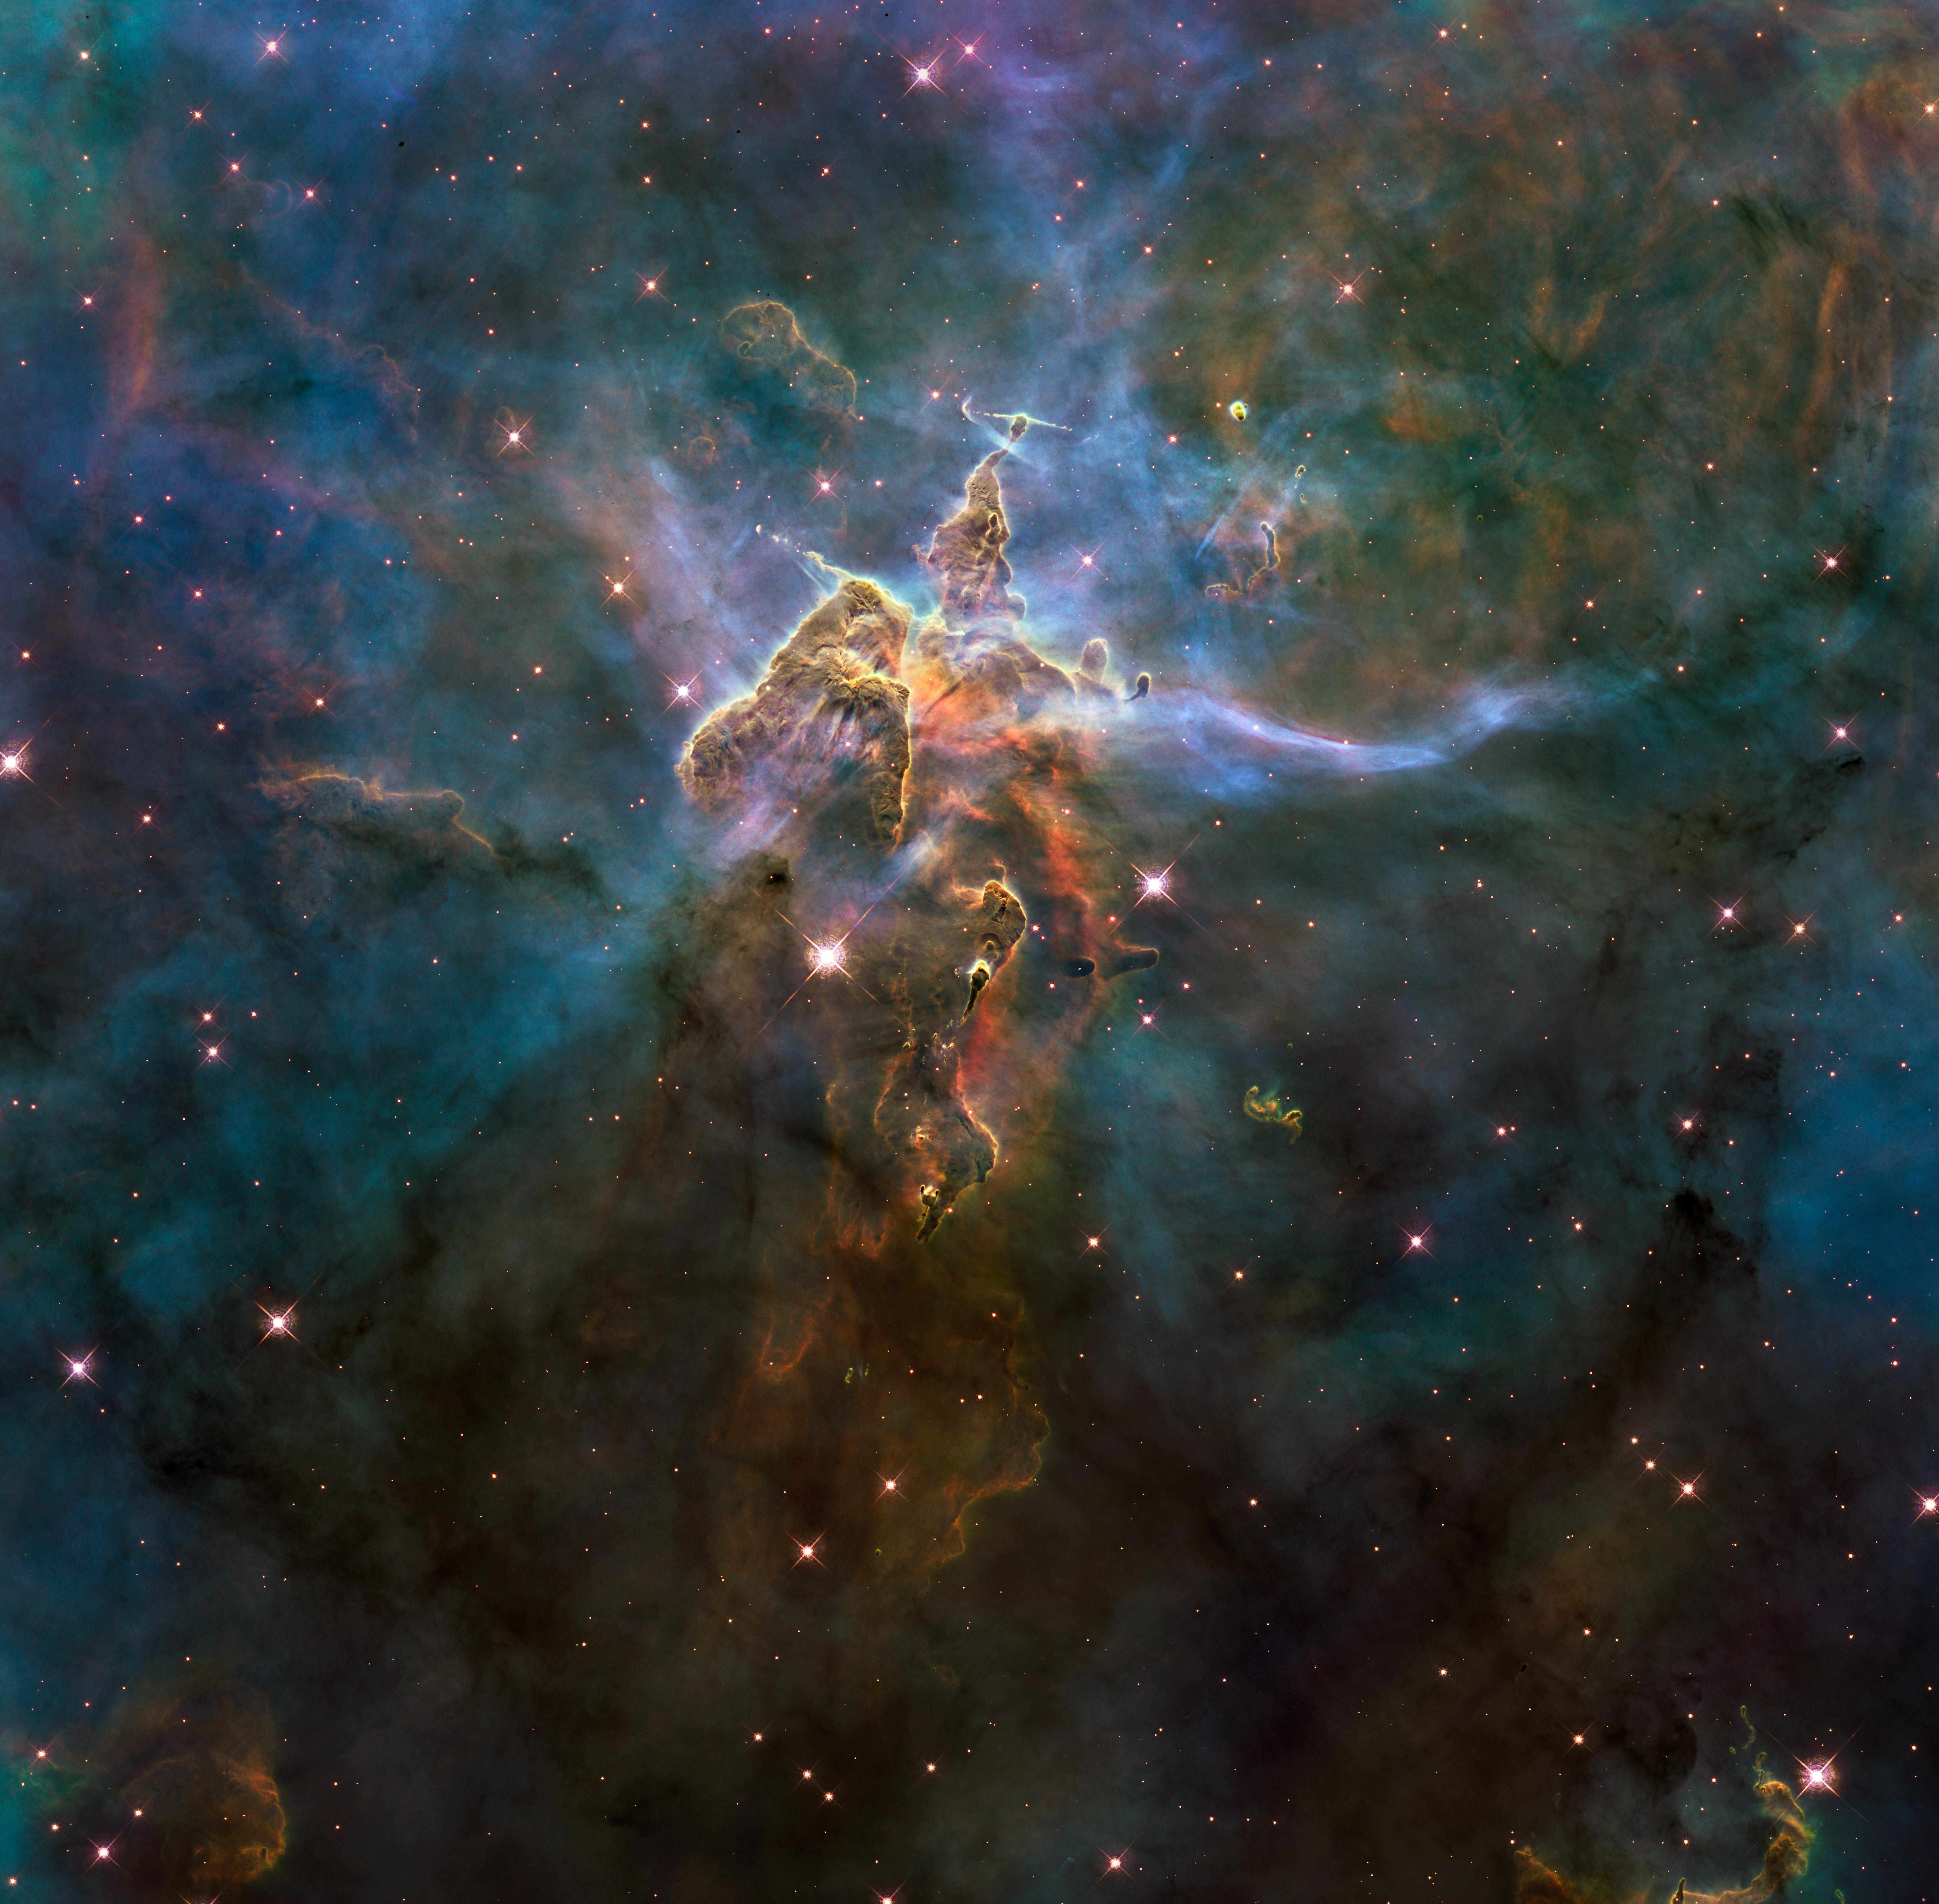

Wide view of “Mystic Mountain”

This craggy fantasy mountaintop enshrouded by wispy clouds looks like a bizarre landscape from Tolkien’s The Lord of the Rings. The NASA/ESA Hubble Space Telescope photograph, which is stranger than fiction, captures the chaotic activity atop a pillar of gas and dust, three light-years high, which is being eaten away by the brilliant light from nearby bright stars. The pillar is also being assaulted from within, as infant stars buried inside it fire off jets of gas that can be seen streaming from towering peaks.

This turbulent cosmic pinnacle lies within a tempestuous stellar nursery called the Carina Nebula, located 7500 light-years away in the southern constellation of Carina. The image marks the 20th anniversary of Hubble's launch and deployment into Earth orbit.

Scorching radiation and fast winds (streams of charged particles) from hot newborn stars in the nebula are shaping and compressing the pillar, causing new stars to form within it. Streamers of hot ionised gas can be seen flowing off the ridges of the structure, and wispy veils of dust, illuminated by starlight, float around its peaks. The pillar is resisting being eroded by radiation.

Nestled inside this dense mountain are fledgling stars. Long streamers of gas can be seen shooting in opposite directions from the pedestal at the top of the image. Another pair of jets is visible at another peak near the centre of the image. These jets are the signpost for new starbirth. The jets are launched by swirling discs around the stars, as these discs allow material to slowly accrete onto the stellar surfaces.

Hubble’s Wide Field Camera 3 observed the pillar on 1-2 February 2010. The colours in this composite image correspond to the glow of oxygen (blue), hydrogen and nitrogen (green), and sulphur (red).

Credit: NASA, ESA and M. Livio and the Hubble 20th Anniversary Team (STScI)